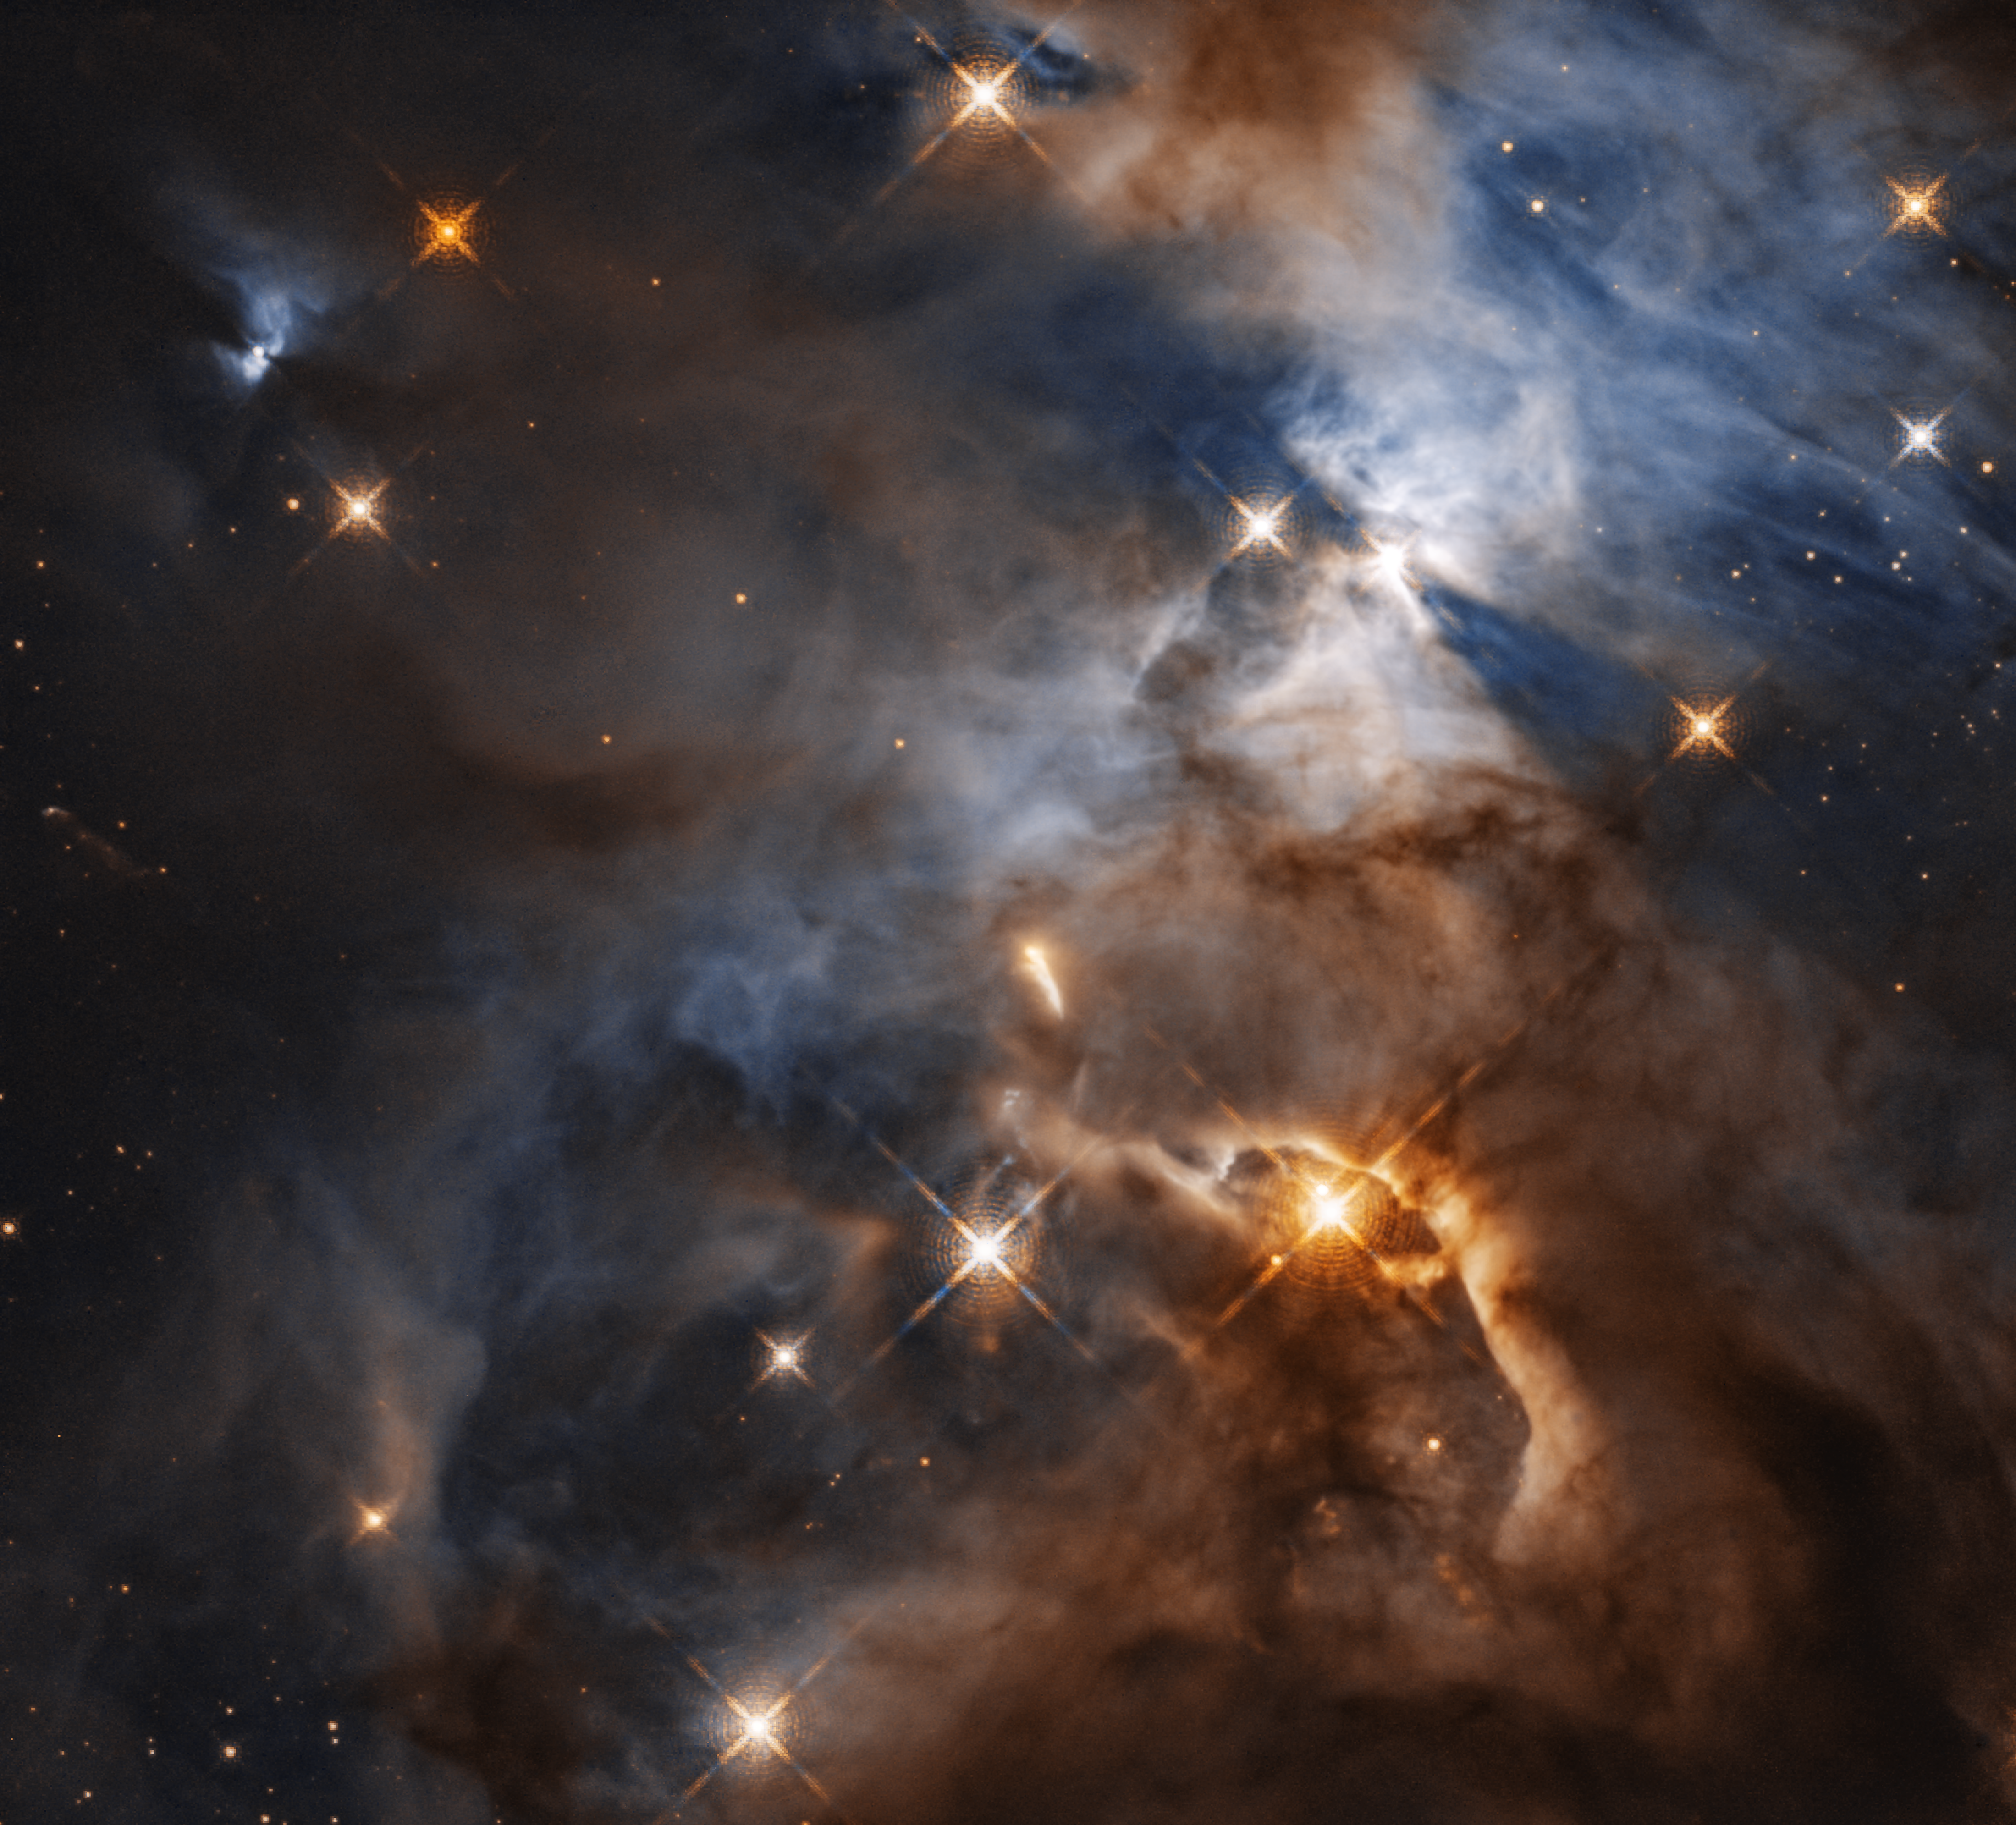

Cosmic shadow of HBC 672

This image, taken with the NASA/ESA Hubble Space Telescope shows the Serpens Nebula, a stellar nursery about 1300 light-years away. Within the nebula, in the upper right of the image, a shadow is created by the protoplanetary disc surrounding the star HBC 672. While the disc of debris is too tiny to be seen even by Hubble, its shadow is projected upon the cloud in which it was born. In this view, the feature — nicknamed the Bat Shadow — spans approximately 200 times the diameter of our own Solar System.

A similar looking shadow phenomenon can be seen emanating from another young star, in the upper left of the image.

Credit: NASA, ESA, and STScI